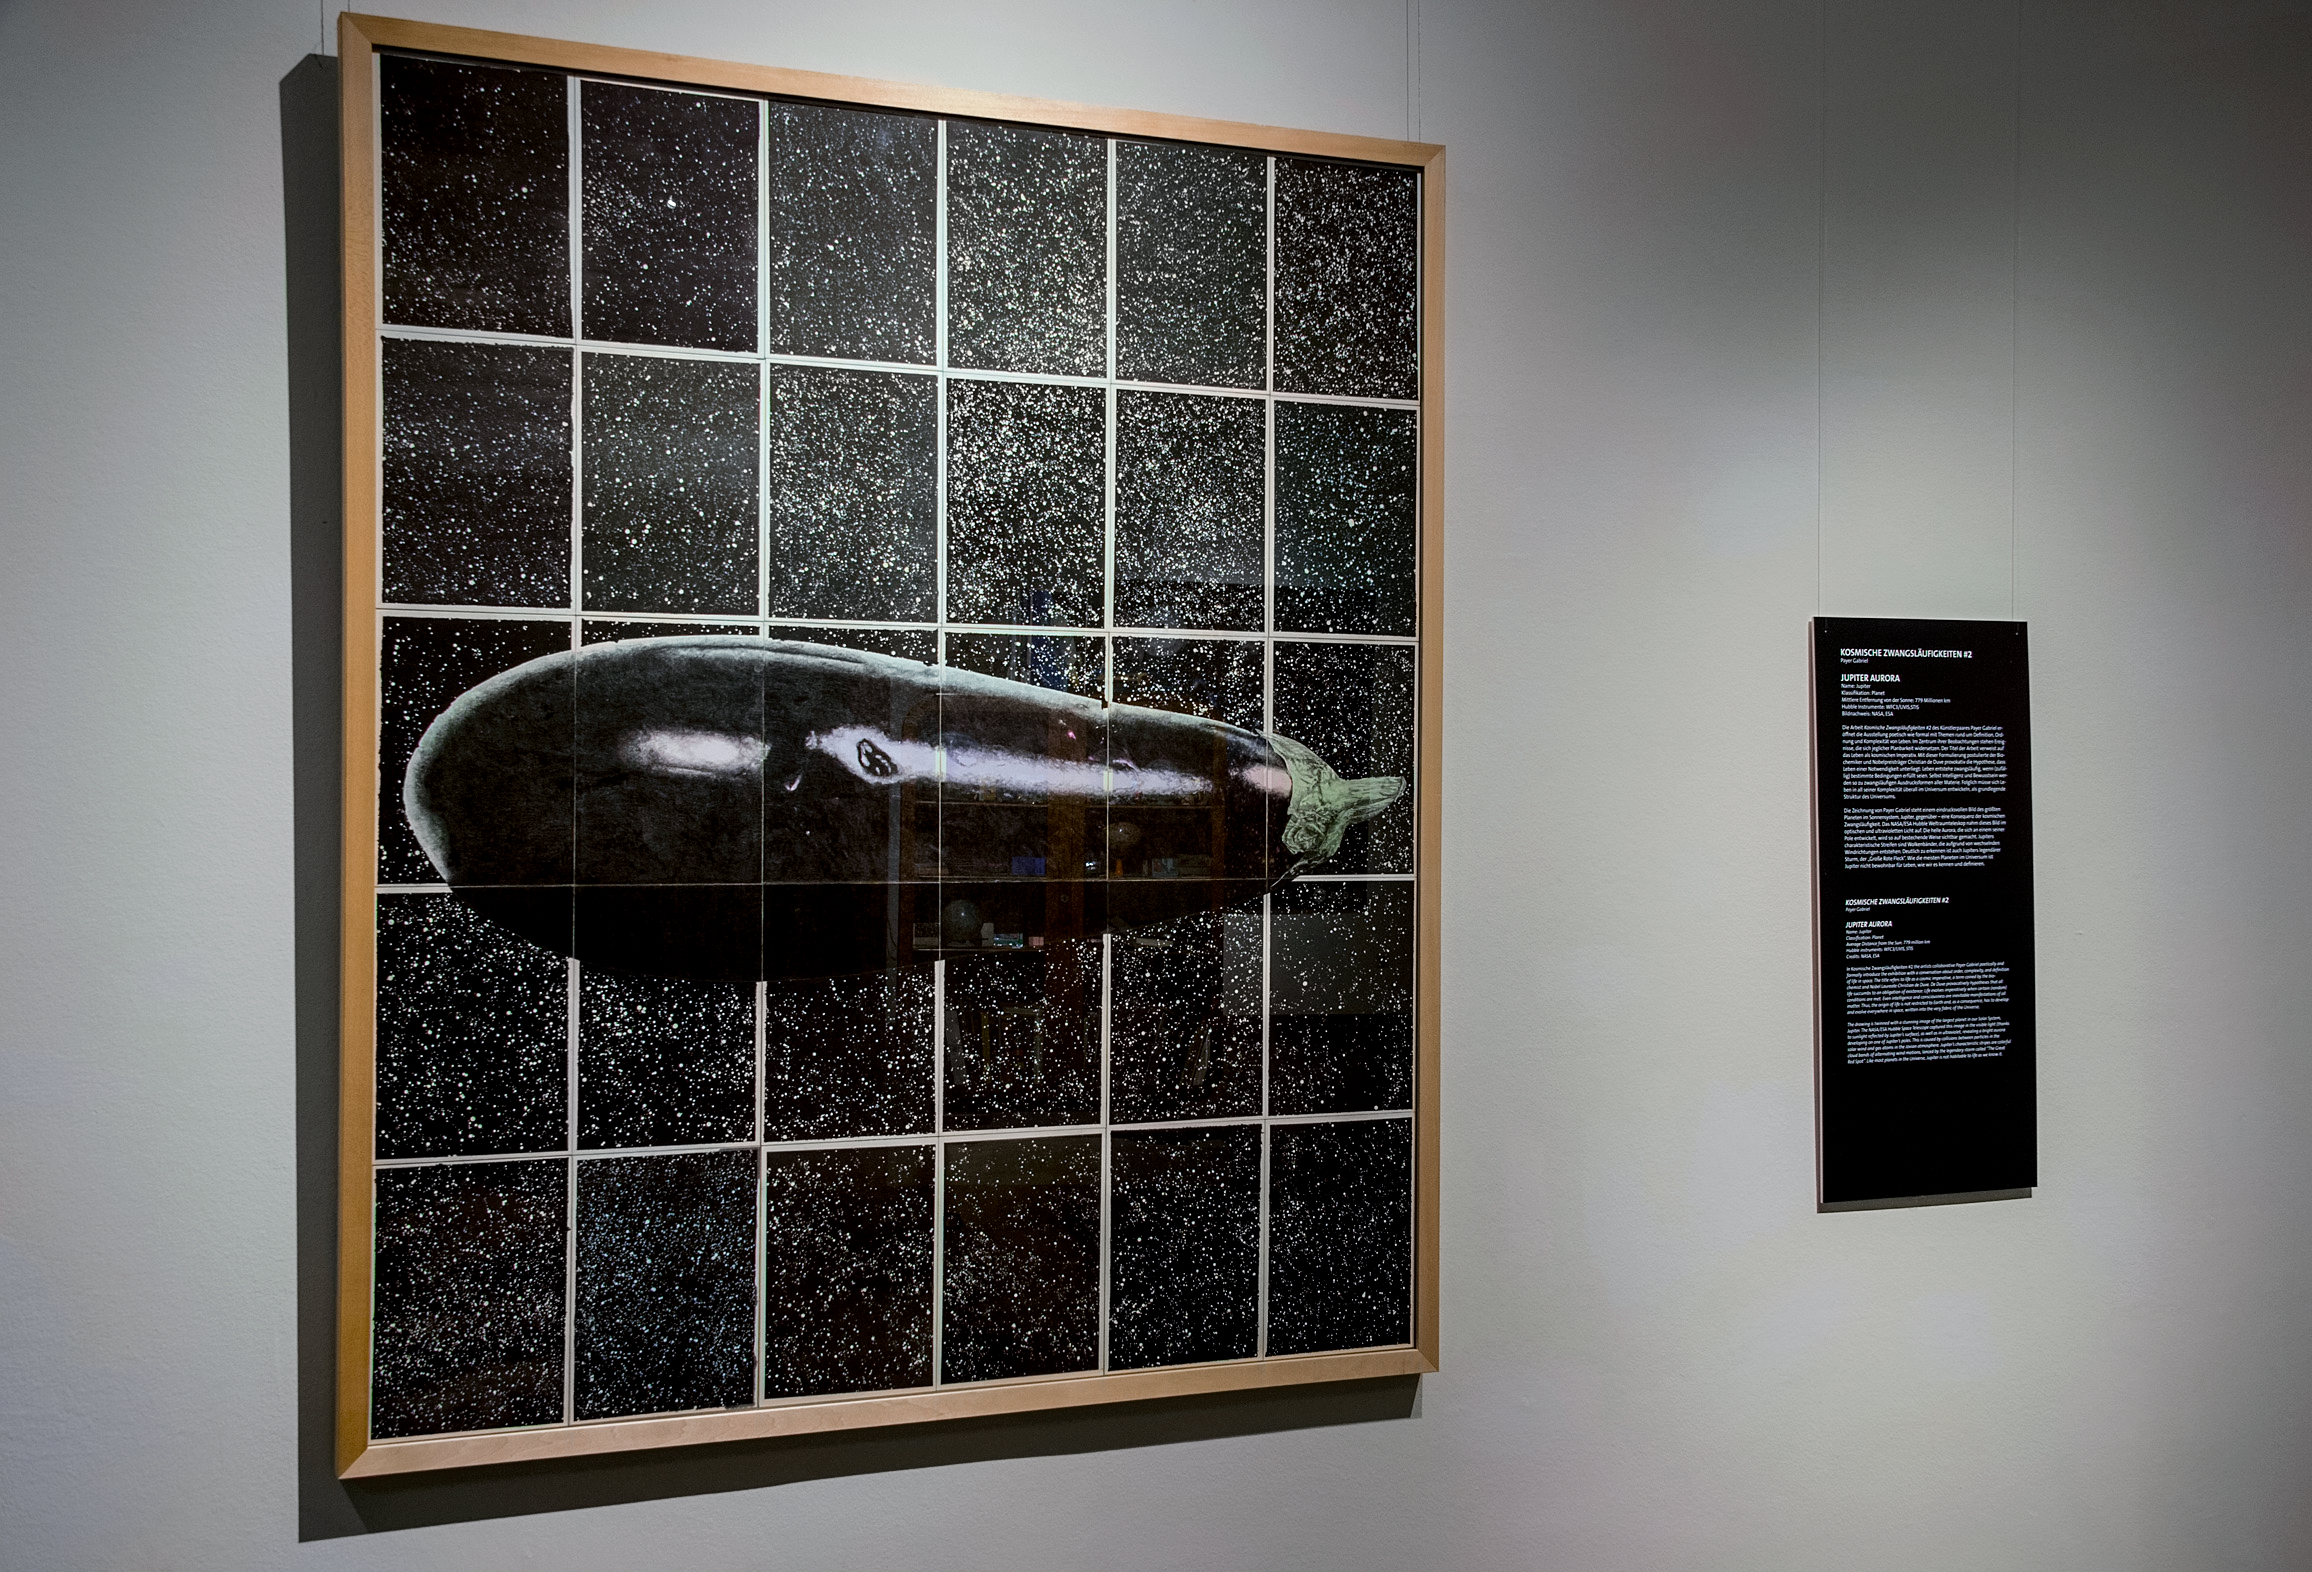

Our Place in Space — Kosmische Zwangsläufigkeiten #2

The work Kosmische Zwangsläufigkeiten #2 was conceived by the artist couple Payer Gabriel. At the centre of their observations are events that resist any plannability. The work is based on the hypothesis of the biochemist and Nobel Prize winner Christian de Duve that life is subject to necessity: Life inevitably arises when (accidentally) certain conditions are fulfilled. Even intelligence and consciousness thus become inevitable forms of expression of all matter. Consequently, life in all its complexity must evolve throughout the universe.

This installation was created for the Hubble travelling exhibition Our Place in Space in Vienna.

Credit: NHM Wien, Kurt Kracher